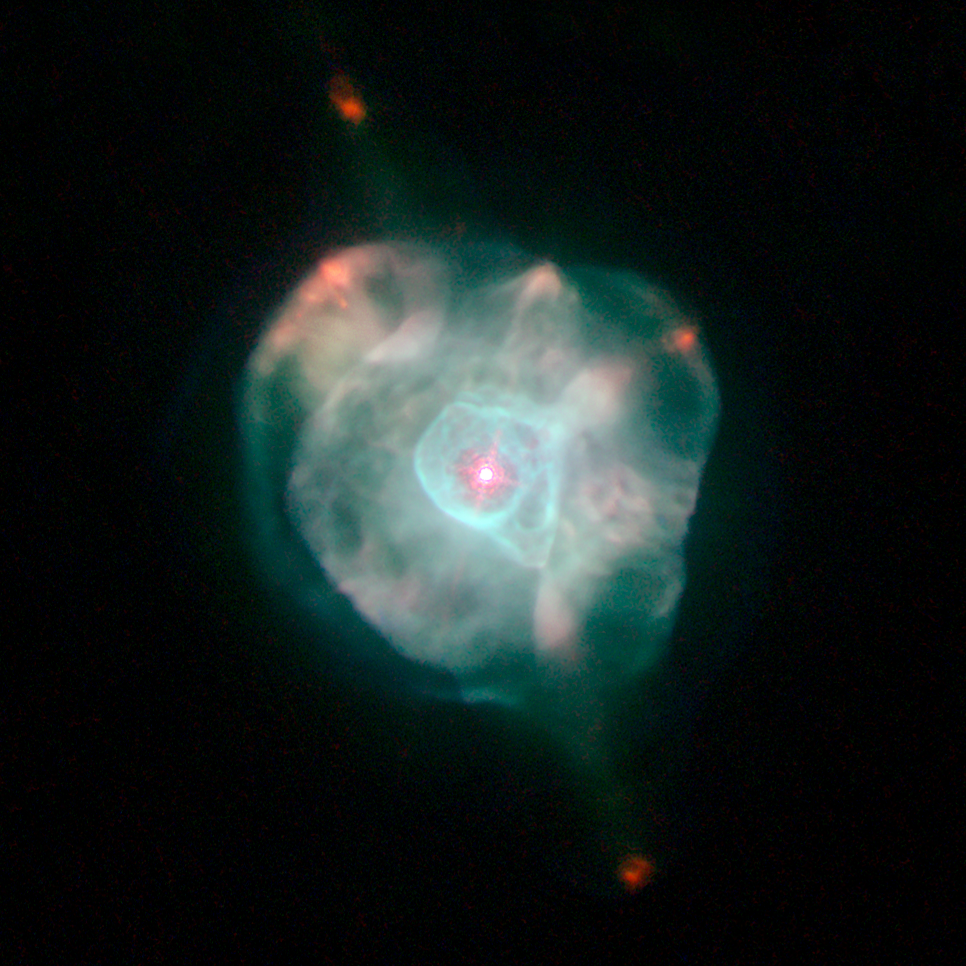

IC 4593

IC 4593

Credit: NASA, ESA, and The Hubble Heritage Team (STScI/AURA)